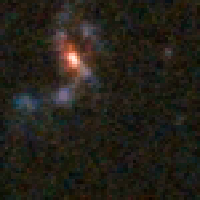

Distant Supernova 2 - Before Outburst

Supernovae are extremely luminous and cause a burst of radiation that often briefly outshines an entire galaxy, before fading from view over several weeks or months. During this short interval a supernova can radiate as much energy as the Sun is expected to emit over its entire life span.

Credit: NASA/ESA and A. Riess (STScI)